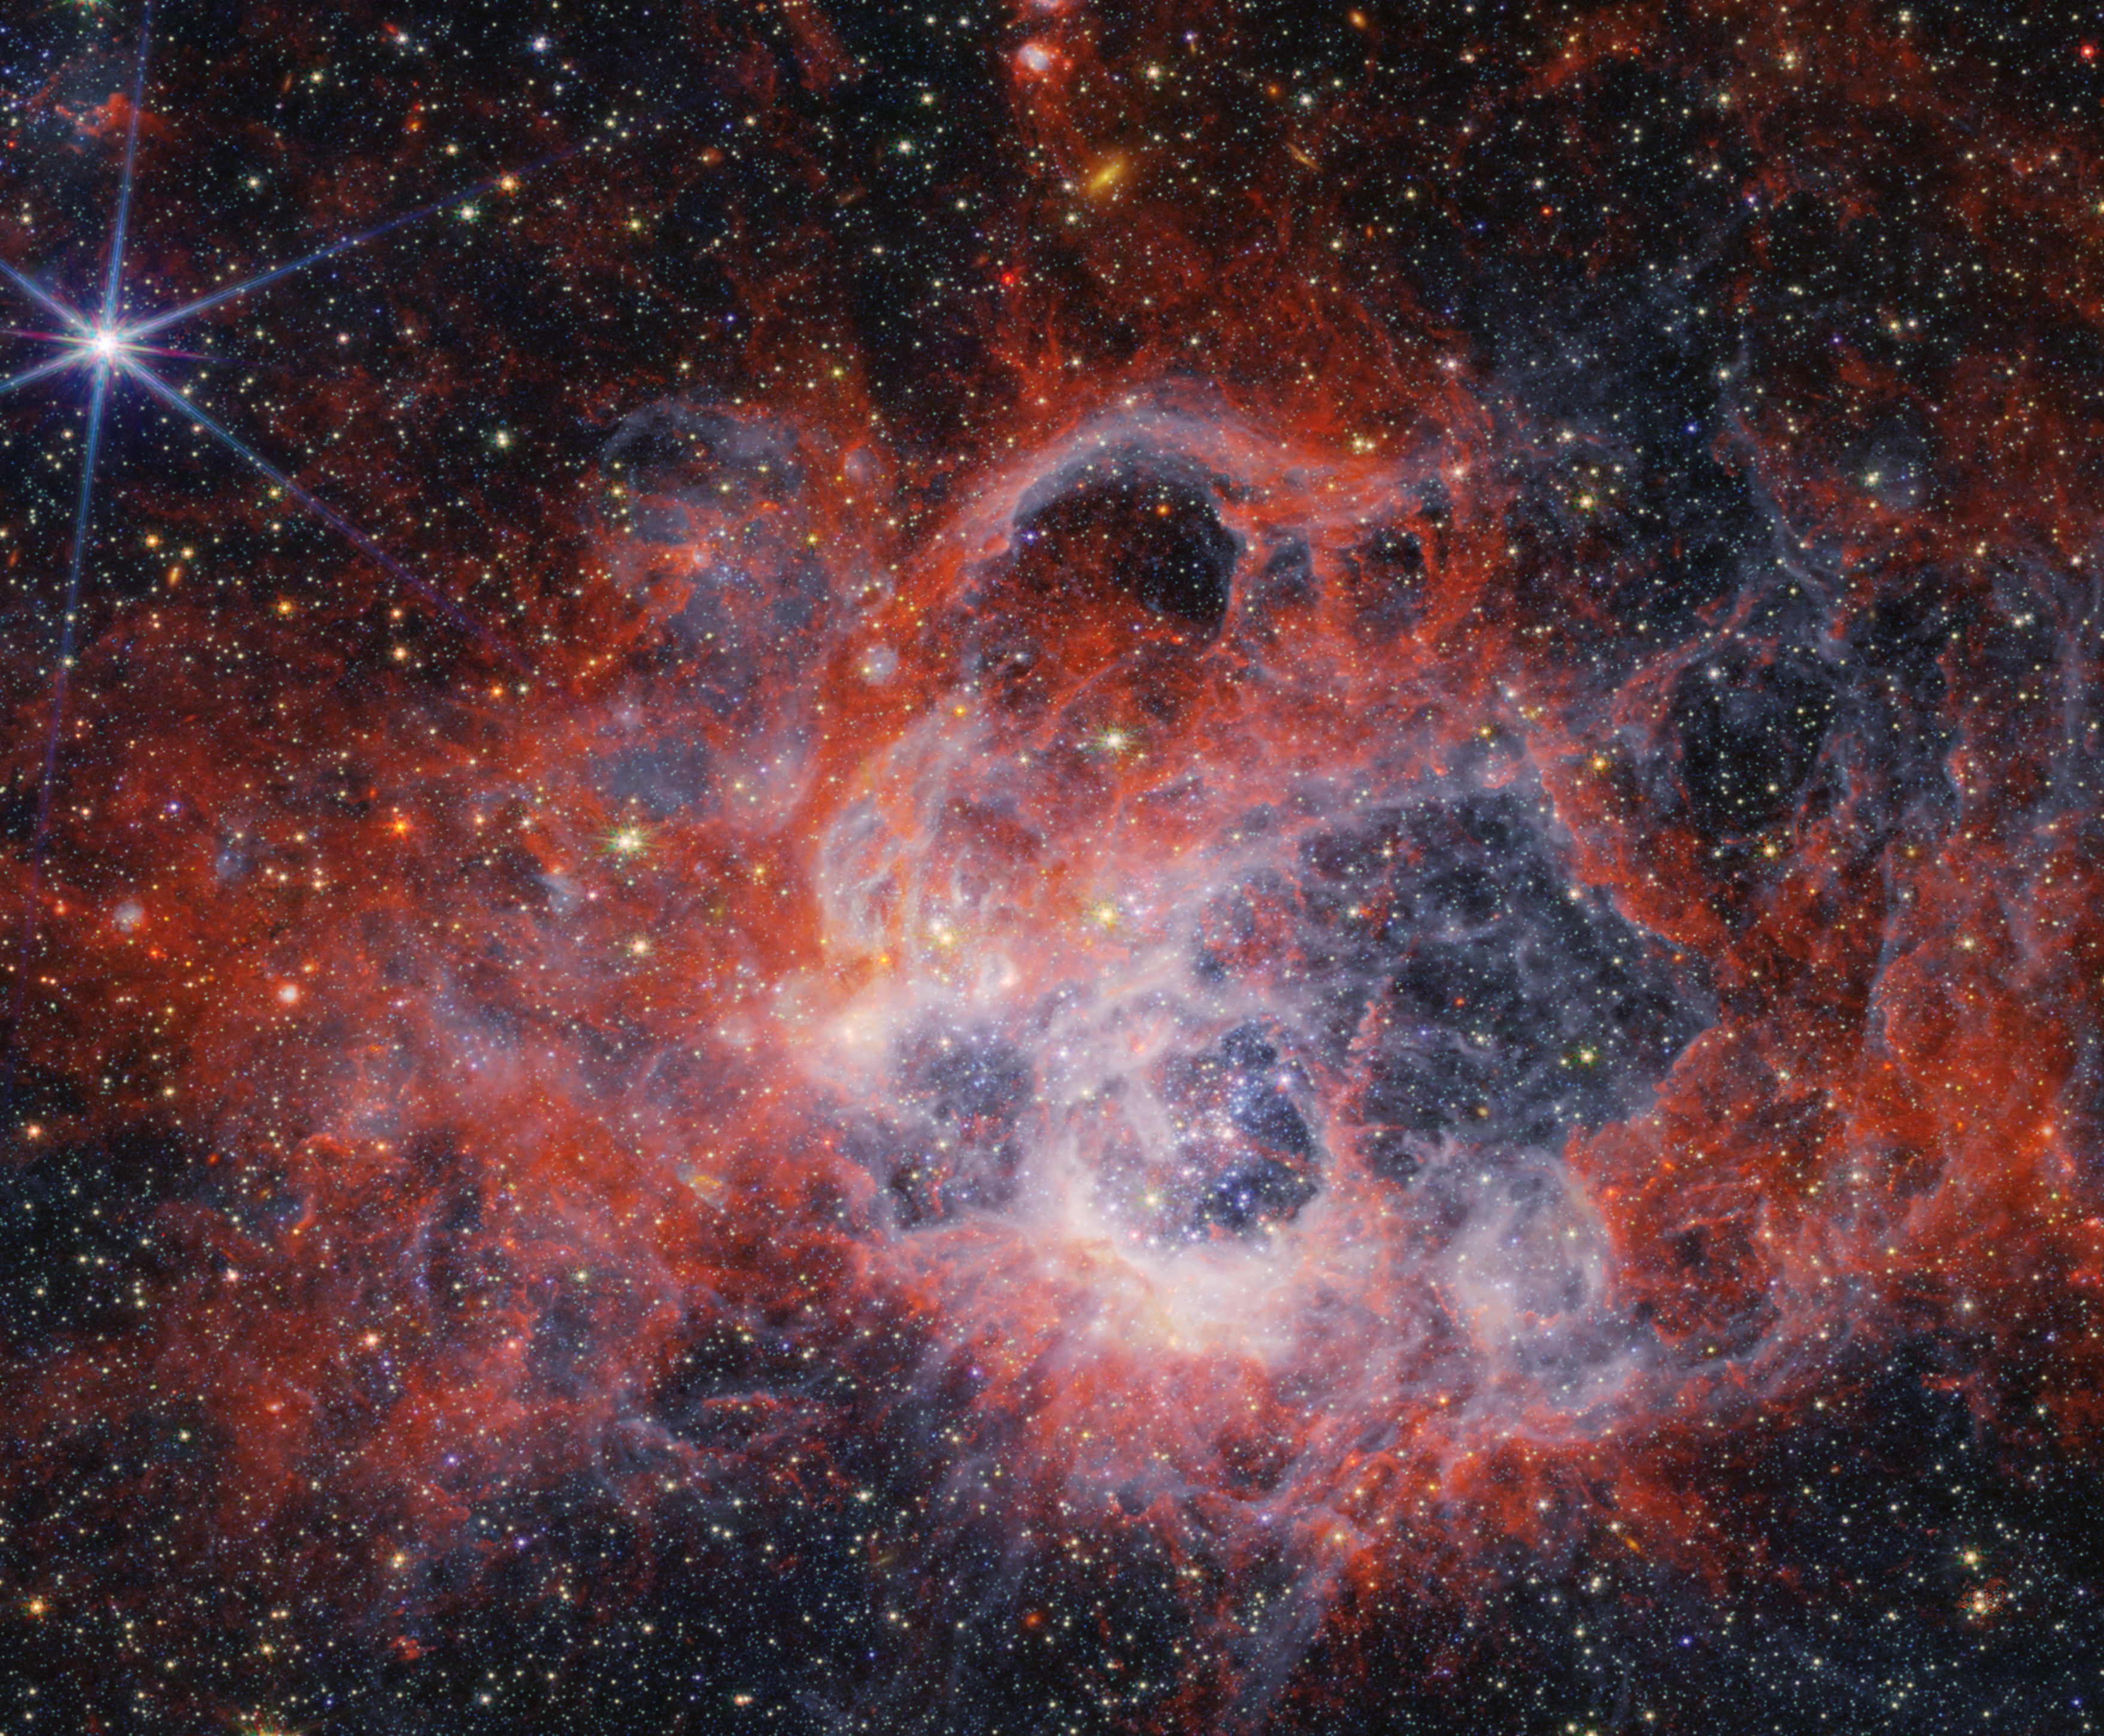

NGC 604 (NIRCam image)

This image from the NASA/ESA/CSA James Webb Space Telescope’s NIRCam (Near-Infrared Camera) of star-forming region NGC 604 shows how stellar winds from bright, hot young stars carve out cavities in surrounding gas and dust.

The bright orange streaks in this image signify the presence of carbon-based molecules known as polycyclic aromatic hydrocarbons, or PAHs. As you travel further from the immediate cavities of dust where the star is forming, the deeper red signifies molecular hydrogen. This cooler gas is a prime environment for star formation. Ionised hydrogen from ultraviolet radiation appears as a white and blue ghostly glow.

NGC 604 is located in the Triangulum Galaxy (M33), 2.73 million light-years away from Earth. It provides an opportunity for astronomers to study a high concentration of very young, massive stars in a nearby region.

Credit: NASA, ESA, CSA, STScI